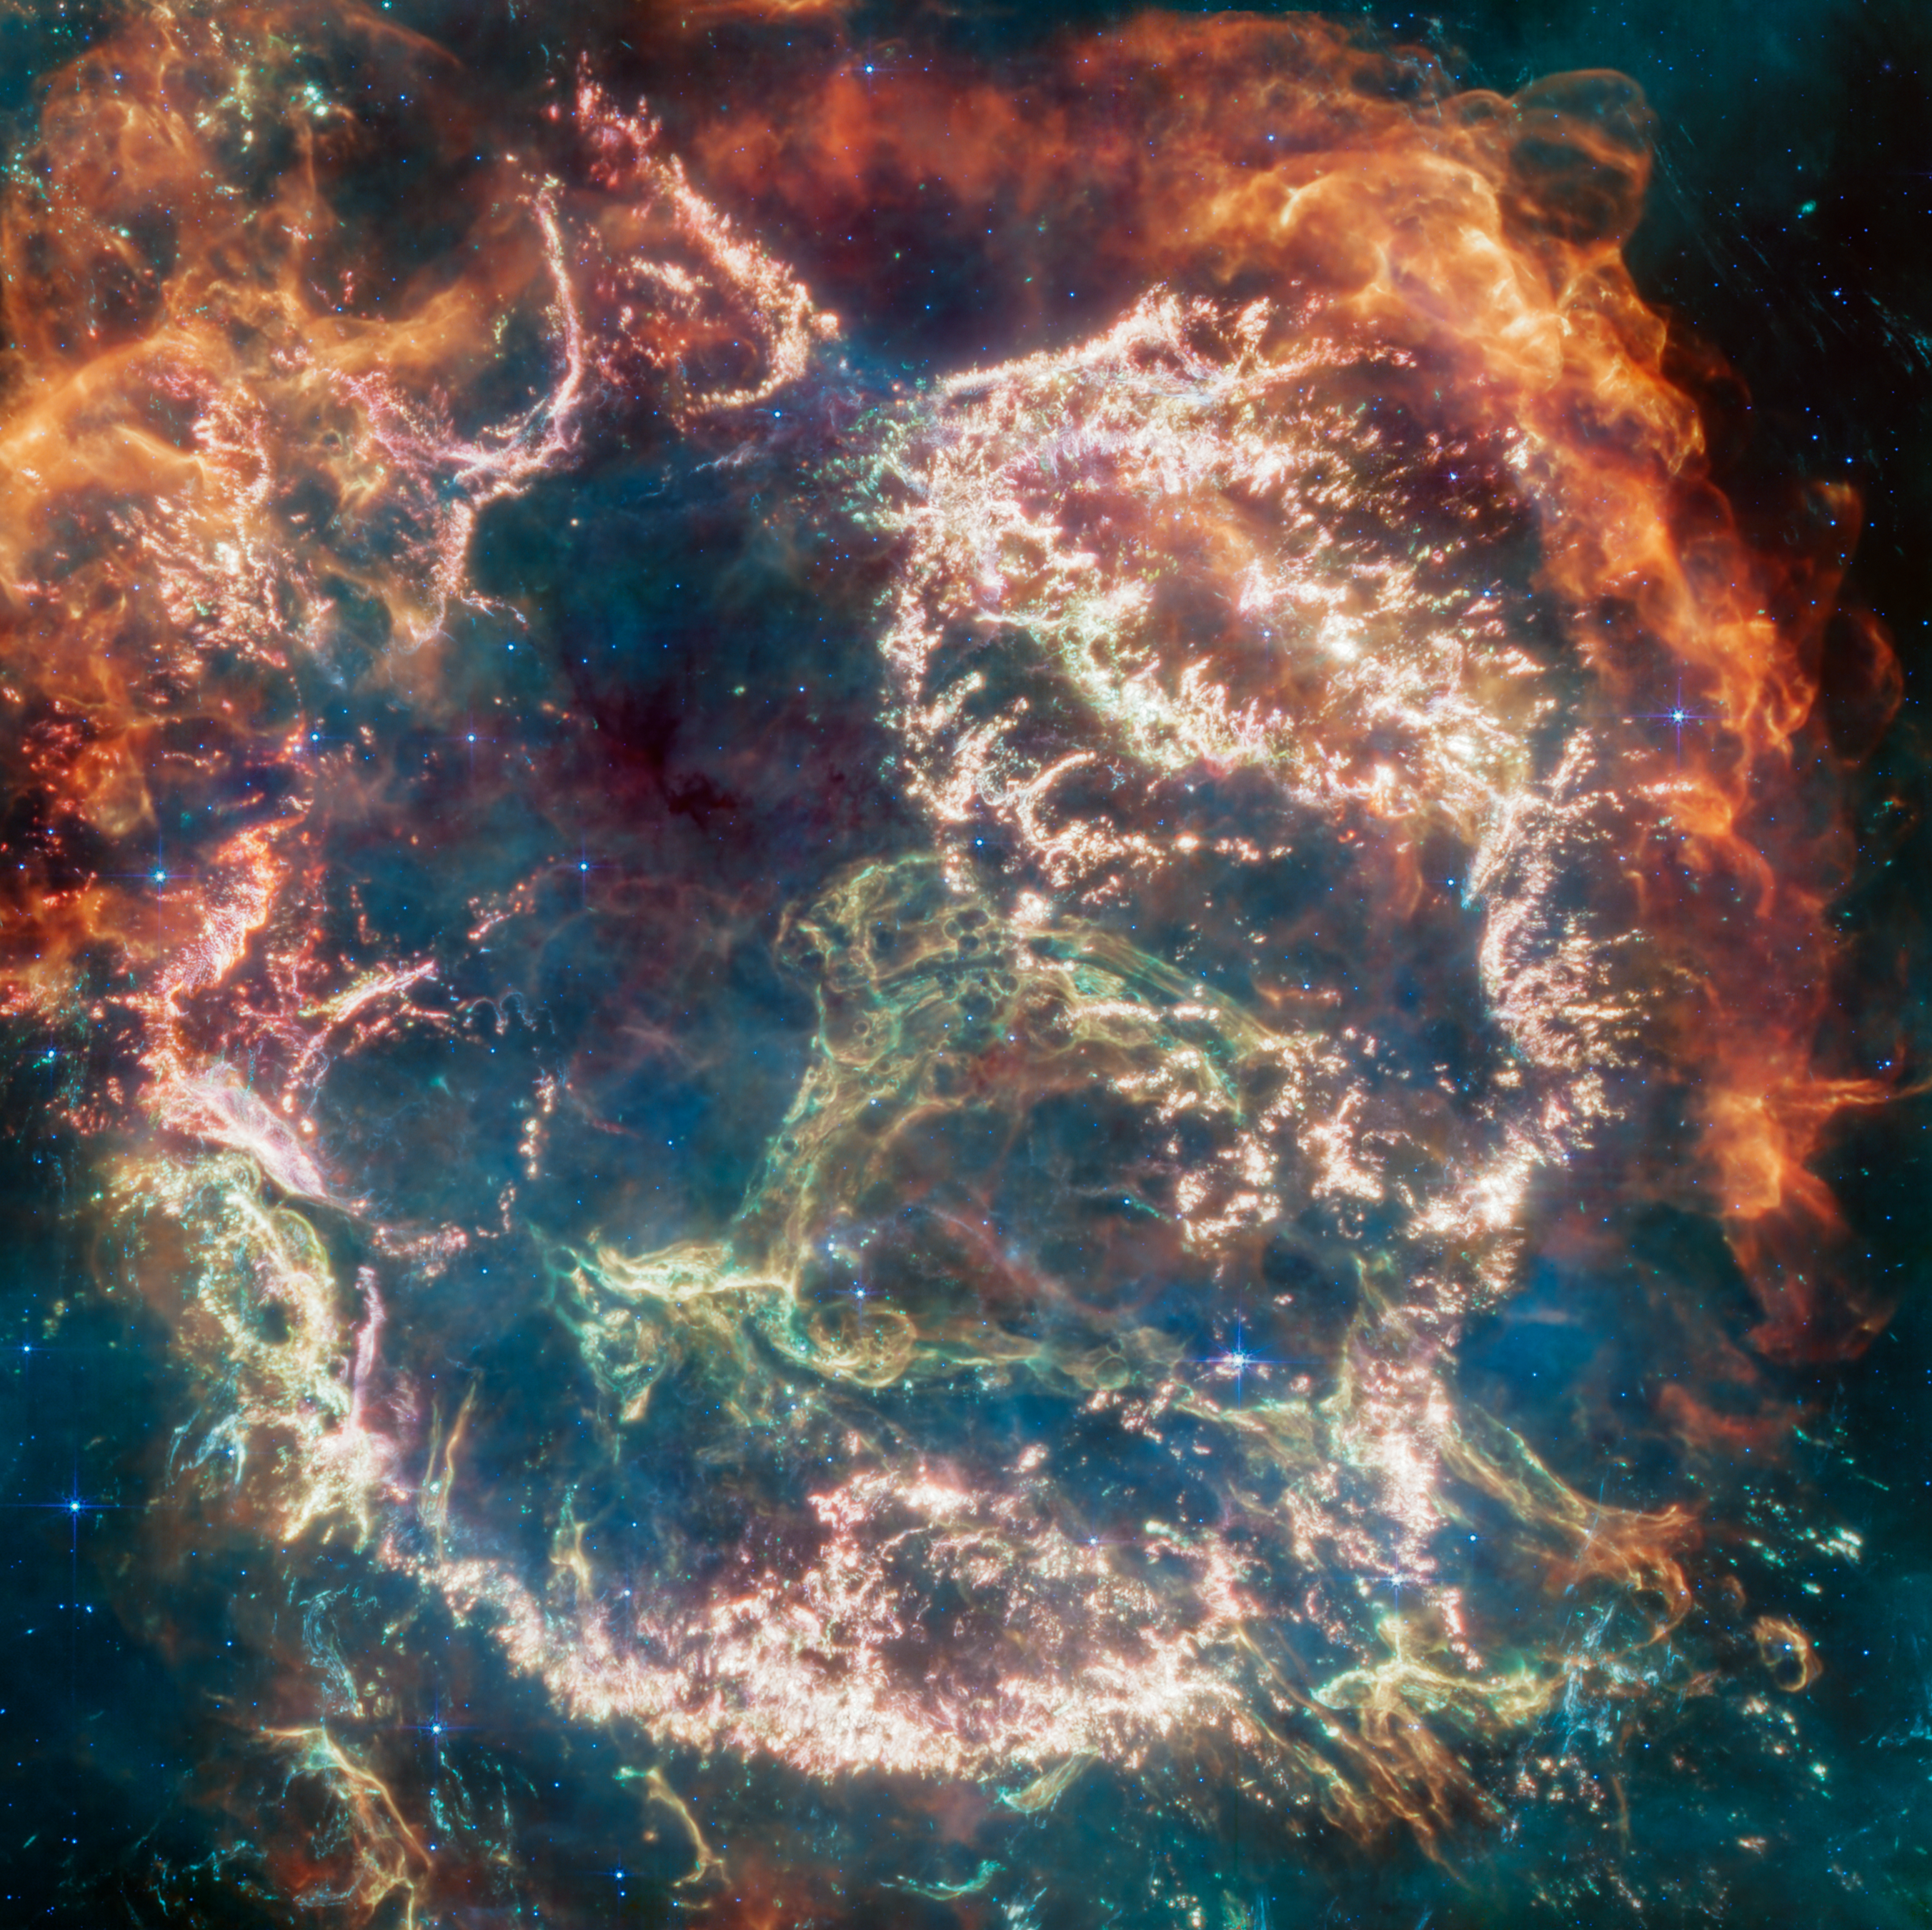

Cas A (MIRI image)

Cassiopeia A (Cas A) is a supernova remnant located about 11 000 light-years from Earth in the constellation Cassiopeia. It spans approximately 10 light-years. This image, released in April 2023, uses data from Webb’s Mid-Infrared Instrument (MIRI) to reveal Cas A in a new light.

On the remnant’s exterior, particularly at the top and left, lie curtains of material ,appearing orange and red, that are due to emission from warm dust. This marks where ejected material from the exploded star is ramming into surrounding circumstellar material.

Interior to this outer shell lie mottled filaments of bright pink studded with clumps and knots. This is material from the star itself, and likely shines due to a mix of various heavy elements and dust emission. The stellar material can also be seen as fainter wisps near the cavity’s interior.

A loop represented in green extends across the right side of the central cavity. Its shape and complexity are unexpected and challenging for scientists to understand.

Credit: NASA, ESA, CSA, D. Milisavljevic (Purdue University), T. Temim (Princeton University), I. De Looze (UGent), J. DePasquale (STScI)